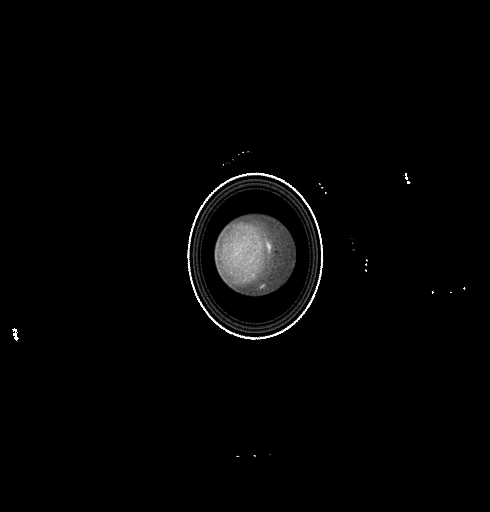

Uranus

This Hubble Space Telescope image of the planet Uranus reveals the planet's rings and bright clouds and a high altitude haze above the planet's south pole.

Credit: Kenneth Seidelmann, U.S. Naval Observatory, and NASA/ESA